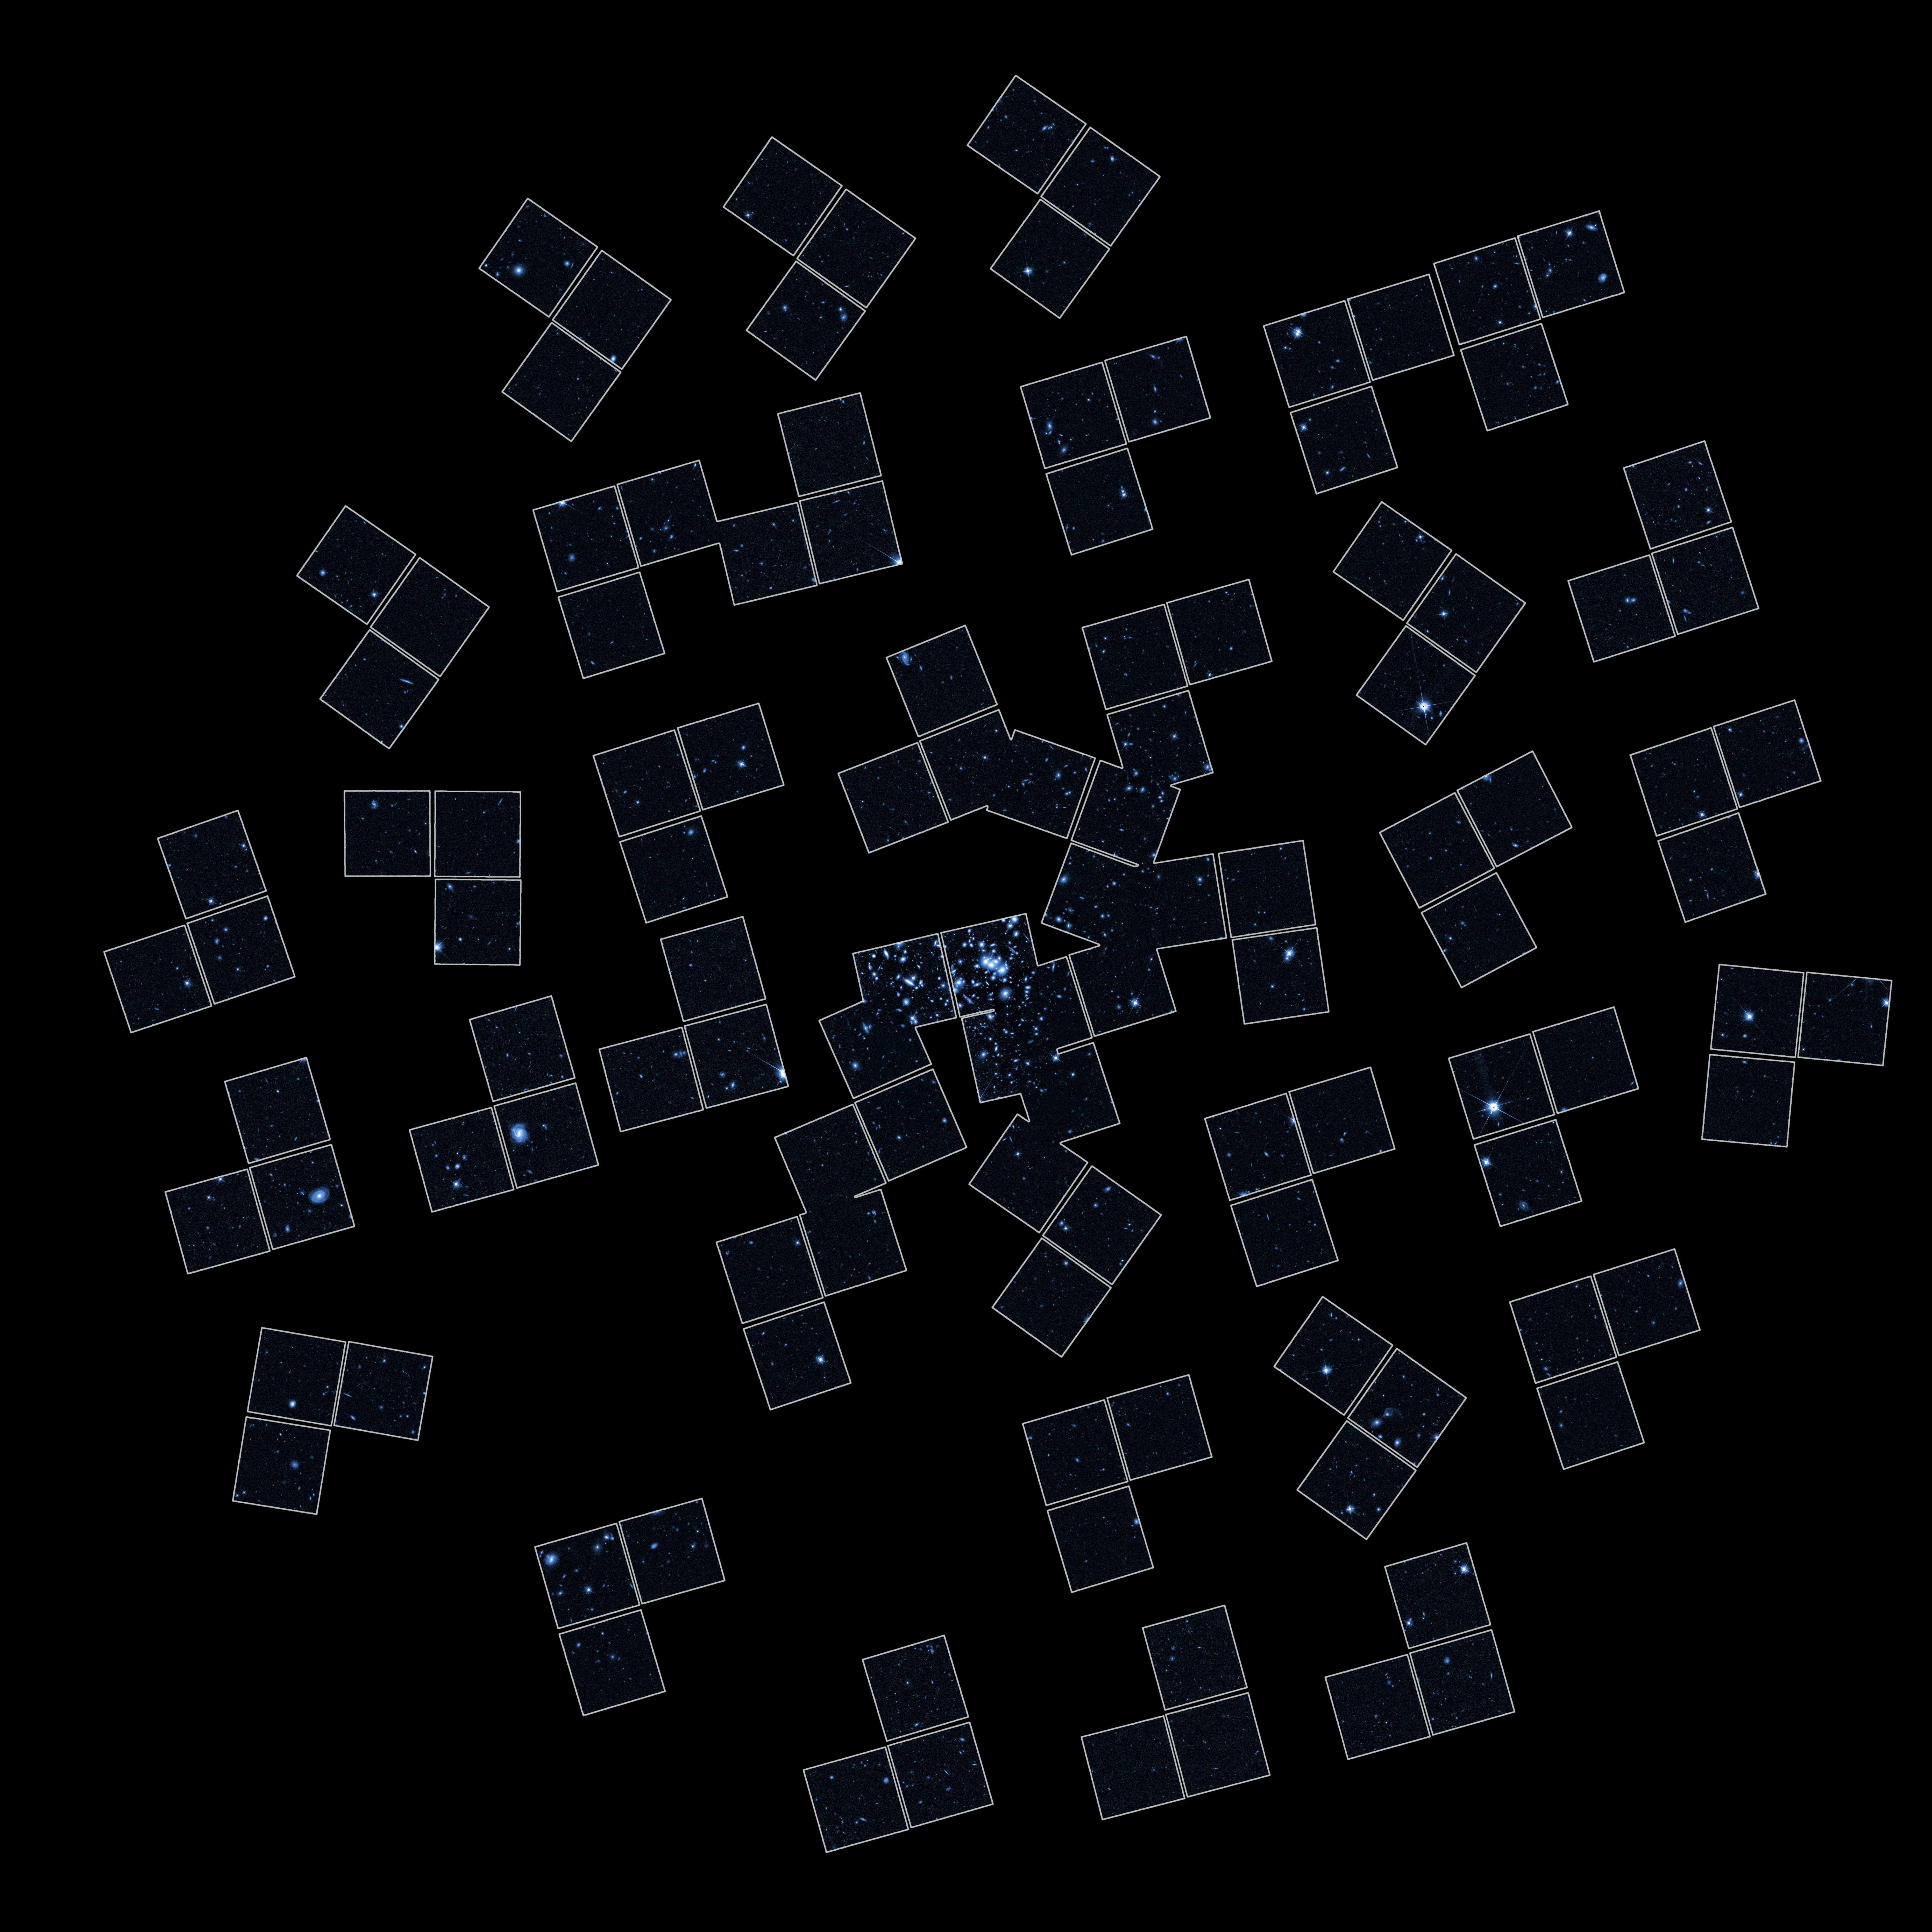

Hubble observes shapes of more than 7000 faint background galaxies

Five days of observations produced altogether the 39 Hubble Wide Field and Planetary Camera 2(WFPC2) images required to map the mass of the galaxy cluster CL0024+1654.

Credit: European Space Agency, NASA and Jean-Paul Kneib (Observatoire Midi-Pyrénées, France/Caltech, USA)